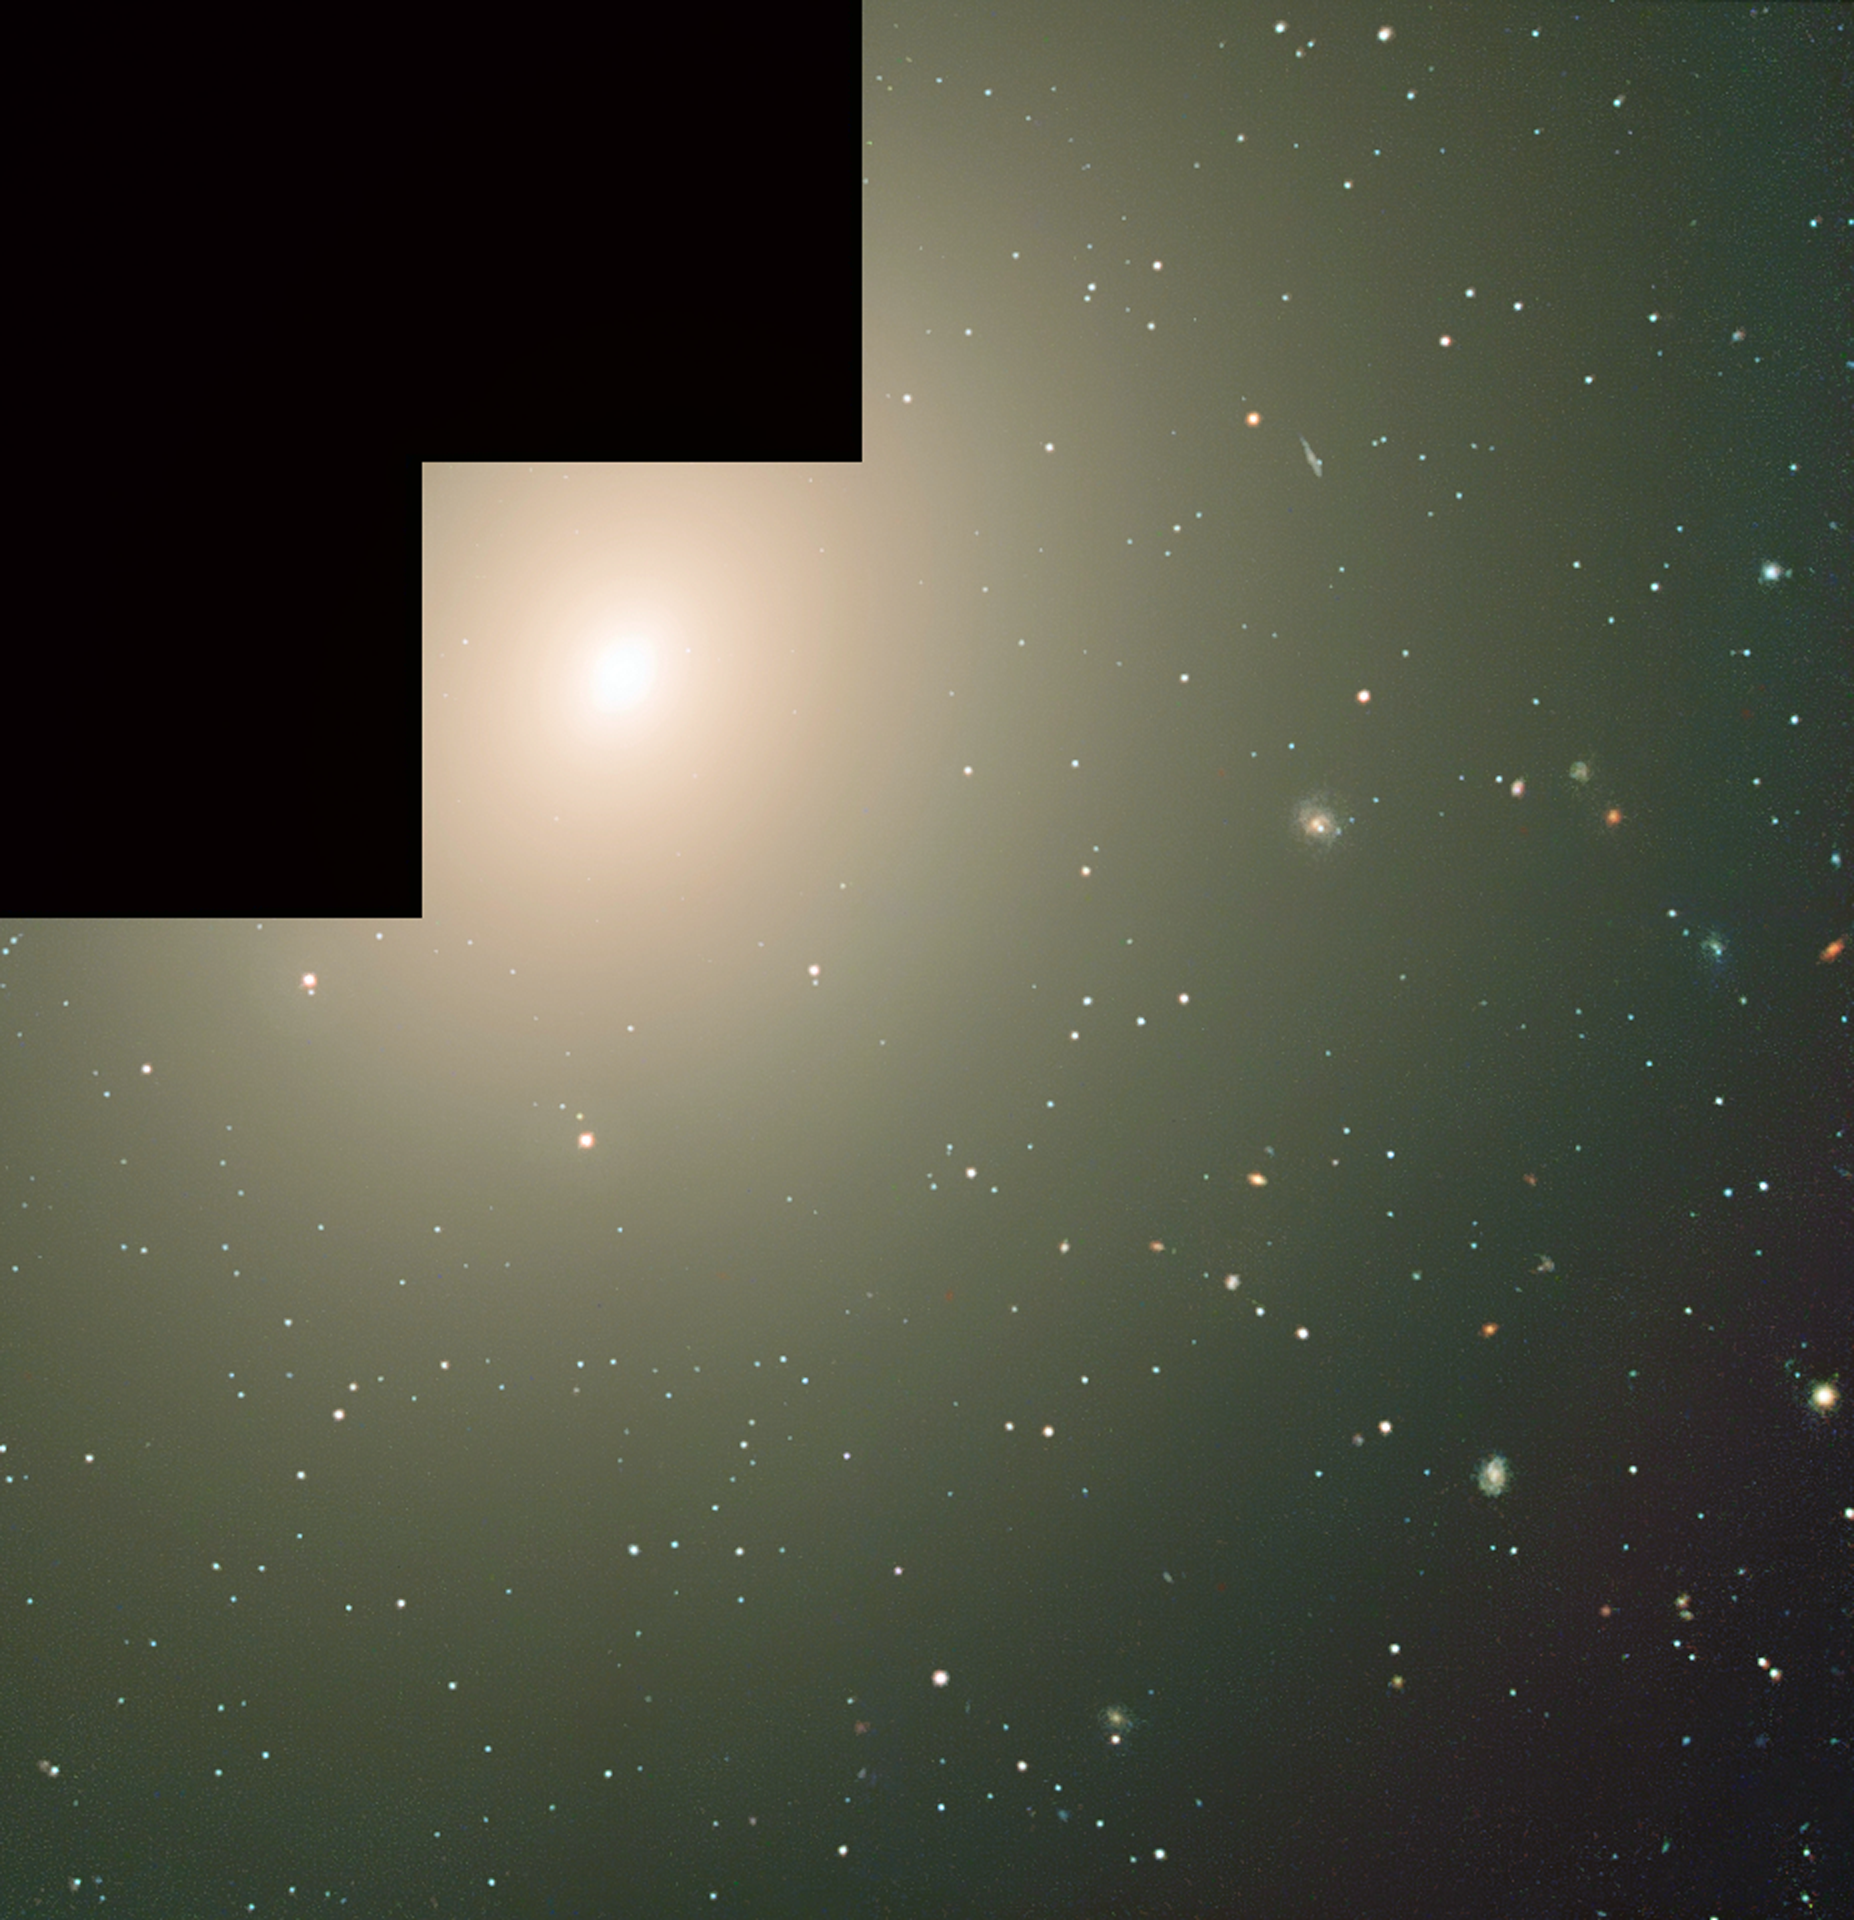

Elliptical galaxy NGC 4365 with numerous young star clusters

This colour image shows the elliptical galaxy NGC 4365. The image is a combination of two exposures taken with the NASA/ESA Hubble Space Telescope and one taken with ESO's Very Large Telescope. By combining these images a group of European and American astronomers have made a major discovery. They have identified a huge number of 'young' stellar clusters, in an old elliptical galaxy. For the first time, it has been possible to identify several distinct periods of star formation in a galaxy as old as this one. Elliptical galaxies have always been considered to have undergone one initial star-forming period and thereafter to be devoid of star formation. Most of the more than one hundred dots in the image are globular star clusters of which the 'young' population (only a few thousand million years old) make up about one half. The light from NGC 4365 is yellow-reddish - a clear indication of its main population of old stars (about 12 thousand million years old). In the background more distant galaxies are seen through the outskirts of NGC 4365. Many of these have redder colours due to their large distance and their larger red shift (due to the expansion of the Universe the further away a galaxy is, the faster it recedes from us and the redder its light therefore becomes). NGC 4365 is located in the constellation of Virgo at an approximate distance of 55 million light-years. This picture is composed of two images obtained with Hubble's Wide Field Planetary Camera 2 on 31 May 1996, and one obtained with the multi-mode ISAAC instrument on the 8.2-m VLT ANTU telescope at the ESO Paranal Observatory (Chile). The images were taken through a green filter (V-band, 2200 seconds, coloured blue), a red filter (I-Band, 2300 seconds, coloured green), and an infrared filter (K-band, 9500 seconds, 0.6 arcseconds seeing, coloured red).

Credit: ESA, ESO, Markus Kissler-Patig (ESO) & Thomas H. Puzia (University of Munich)